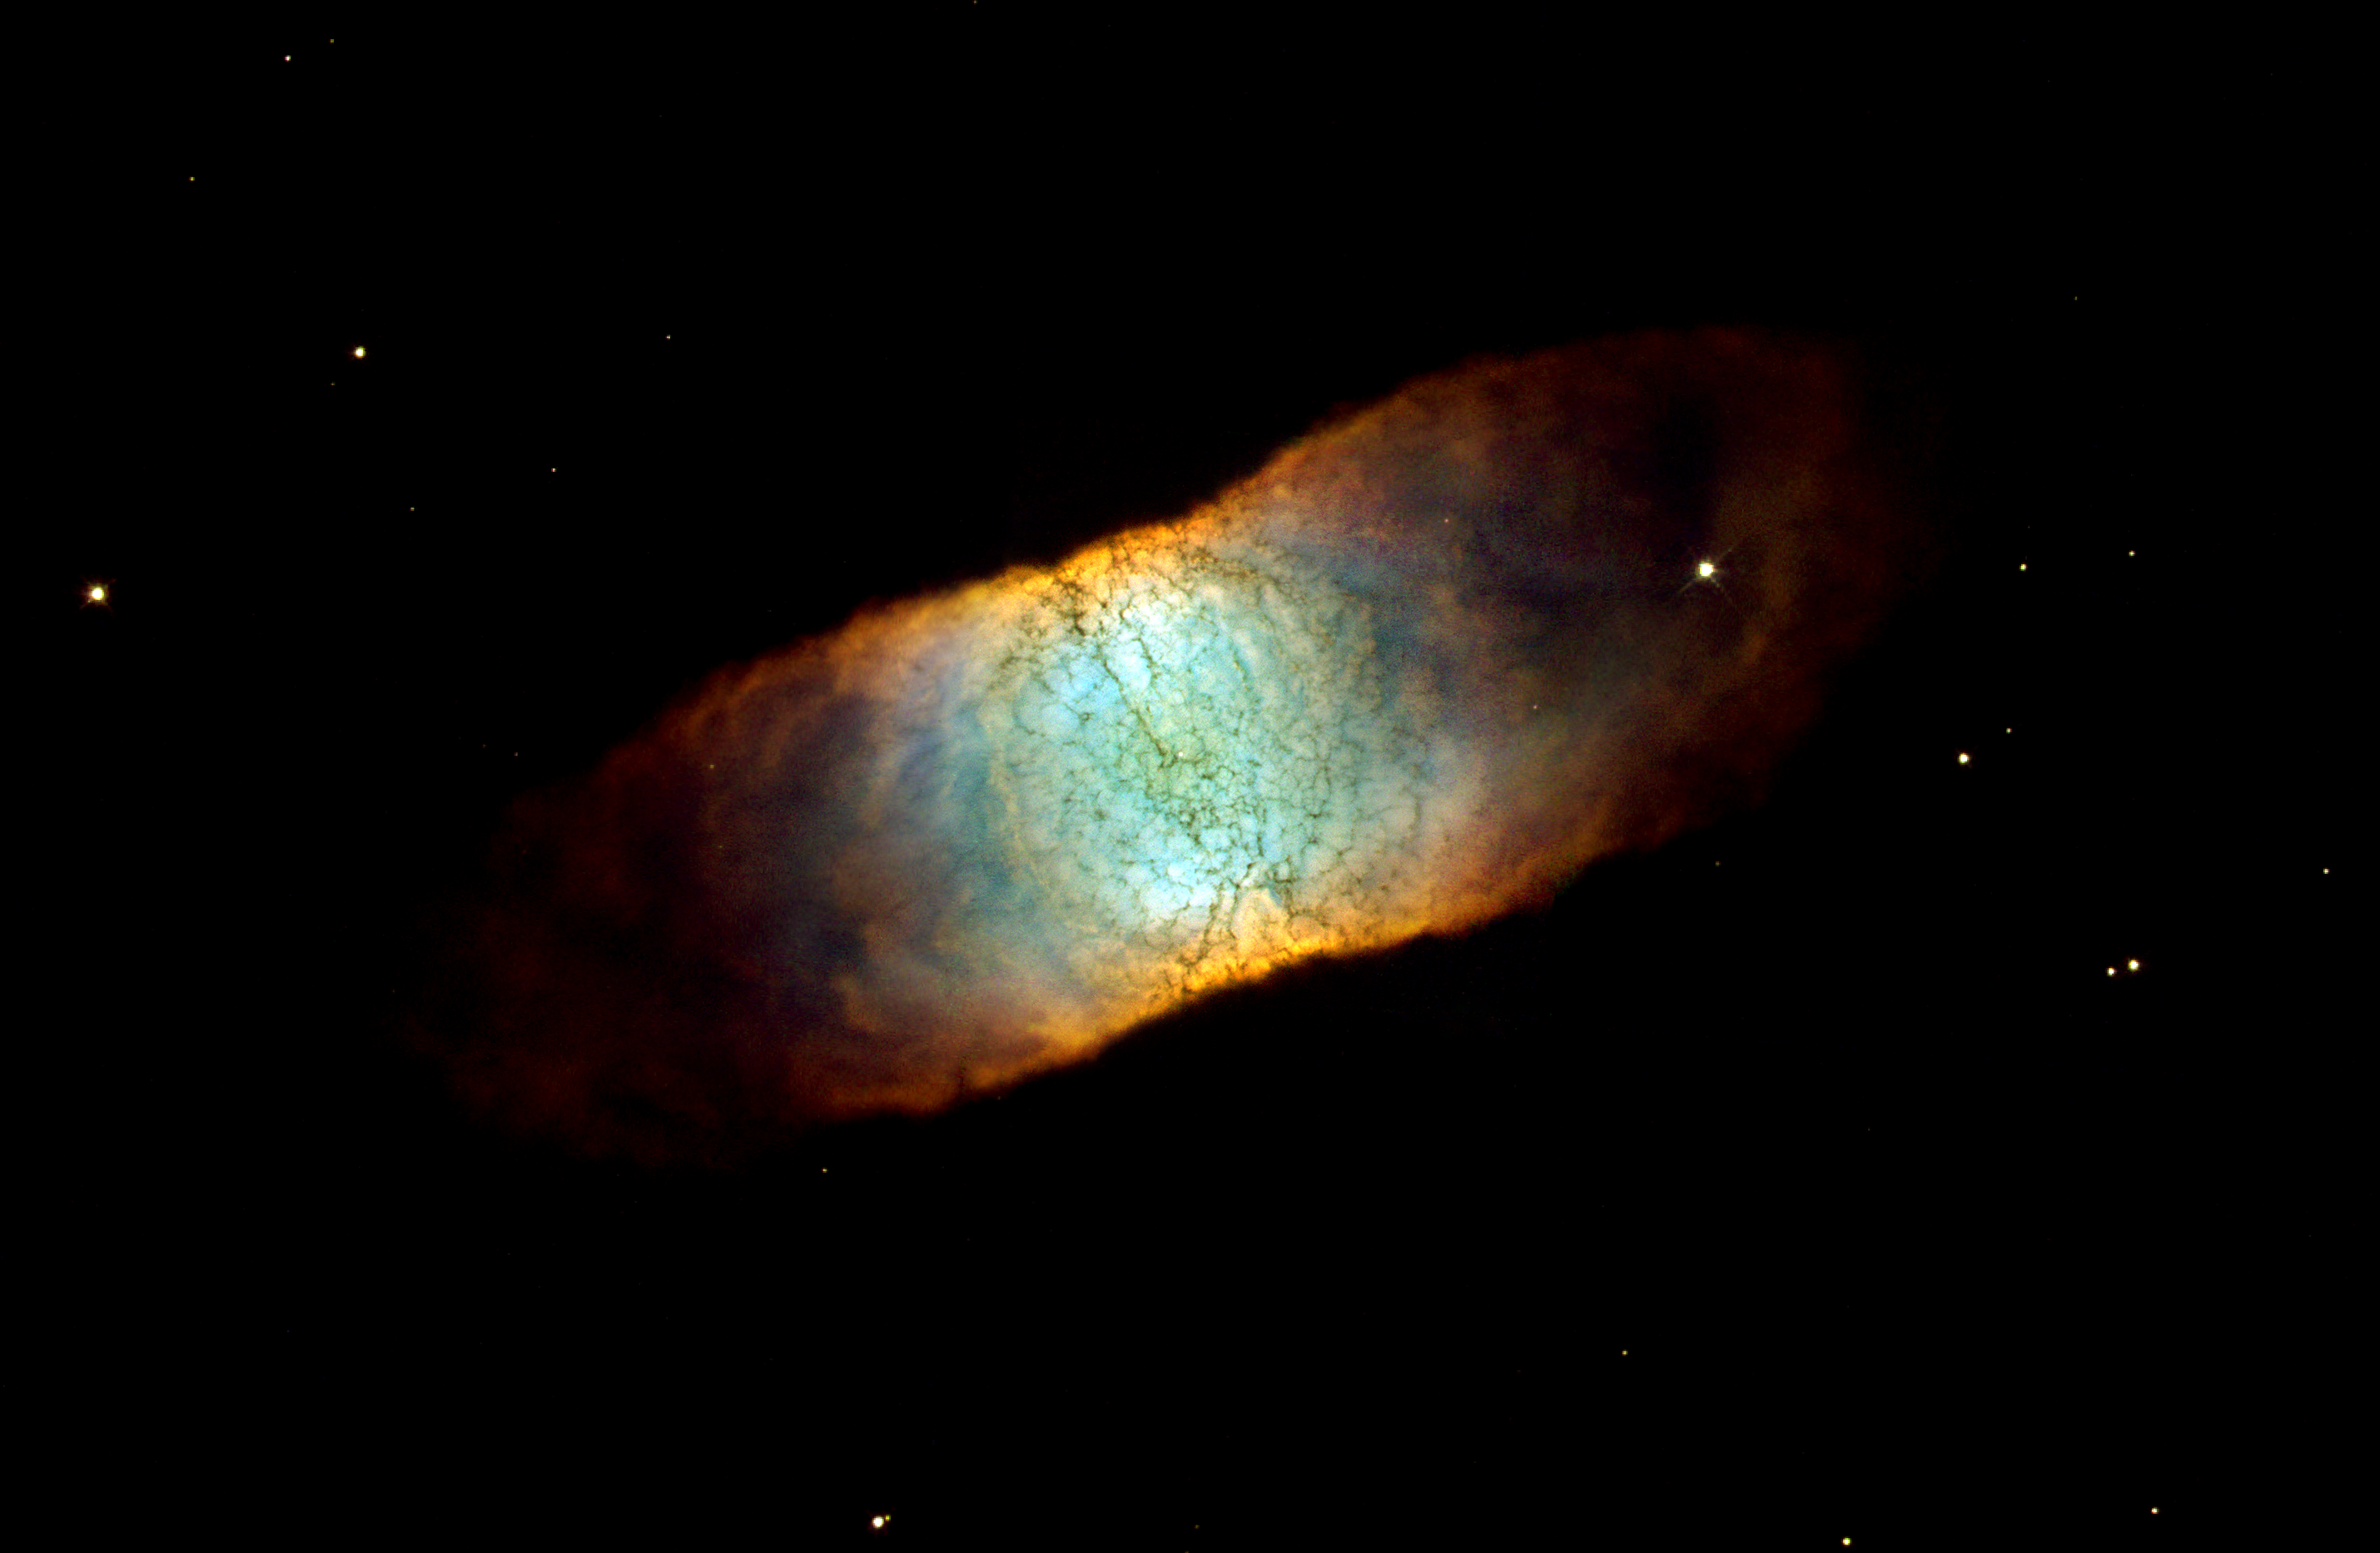

IC beauty

The Hubble telescope reveals a rainbow of colours in this dying star, called IC 4406. Like many other so-called planetary nebulae, IC 4406 exhibits a high degree of symmetry. The nebula's left and right halves are nearly mirror images of the other. If we could fly around IC 4406 in a spaceship, we would see that the gas and dust form a vast donut of material streaming outward from the dying star. We don't see the donut shape in this photograph because we are viewing IC 4406 from the Earth-orbiting Hubble telescope. From this vantage point, we are seeing the side of the donut.

This side view allows us to see the intricate tendrils of material that have been compared to the eye's retina. In fact, IC 4406 is dubbed the 'Retina Nebula.'

Credit: NASA/ESA and The Hubble Heritage Team STScI/AURA